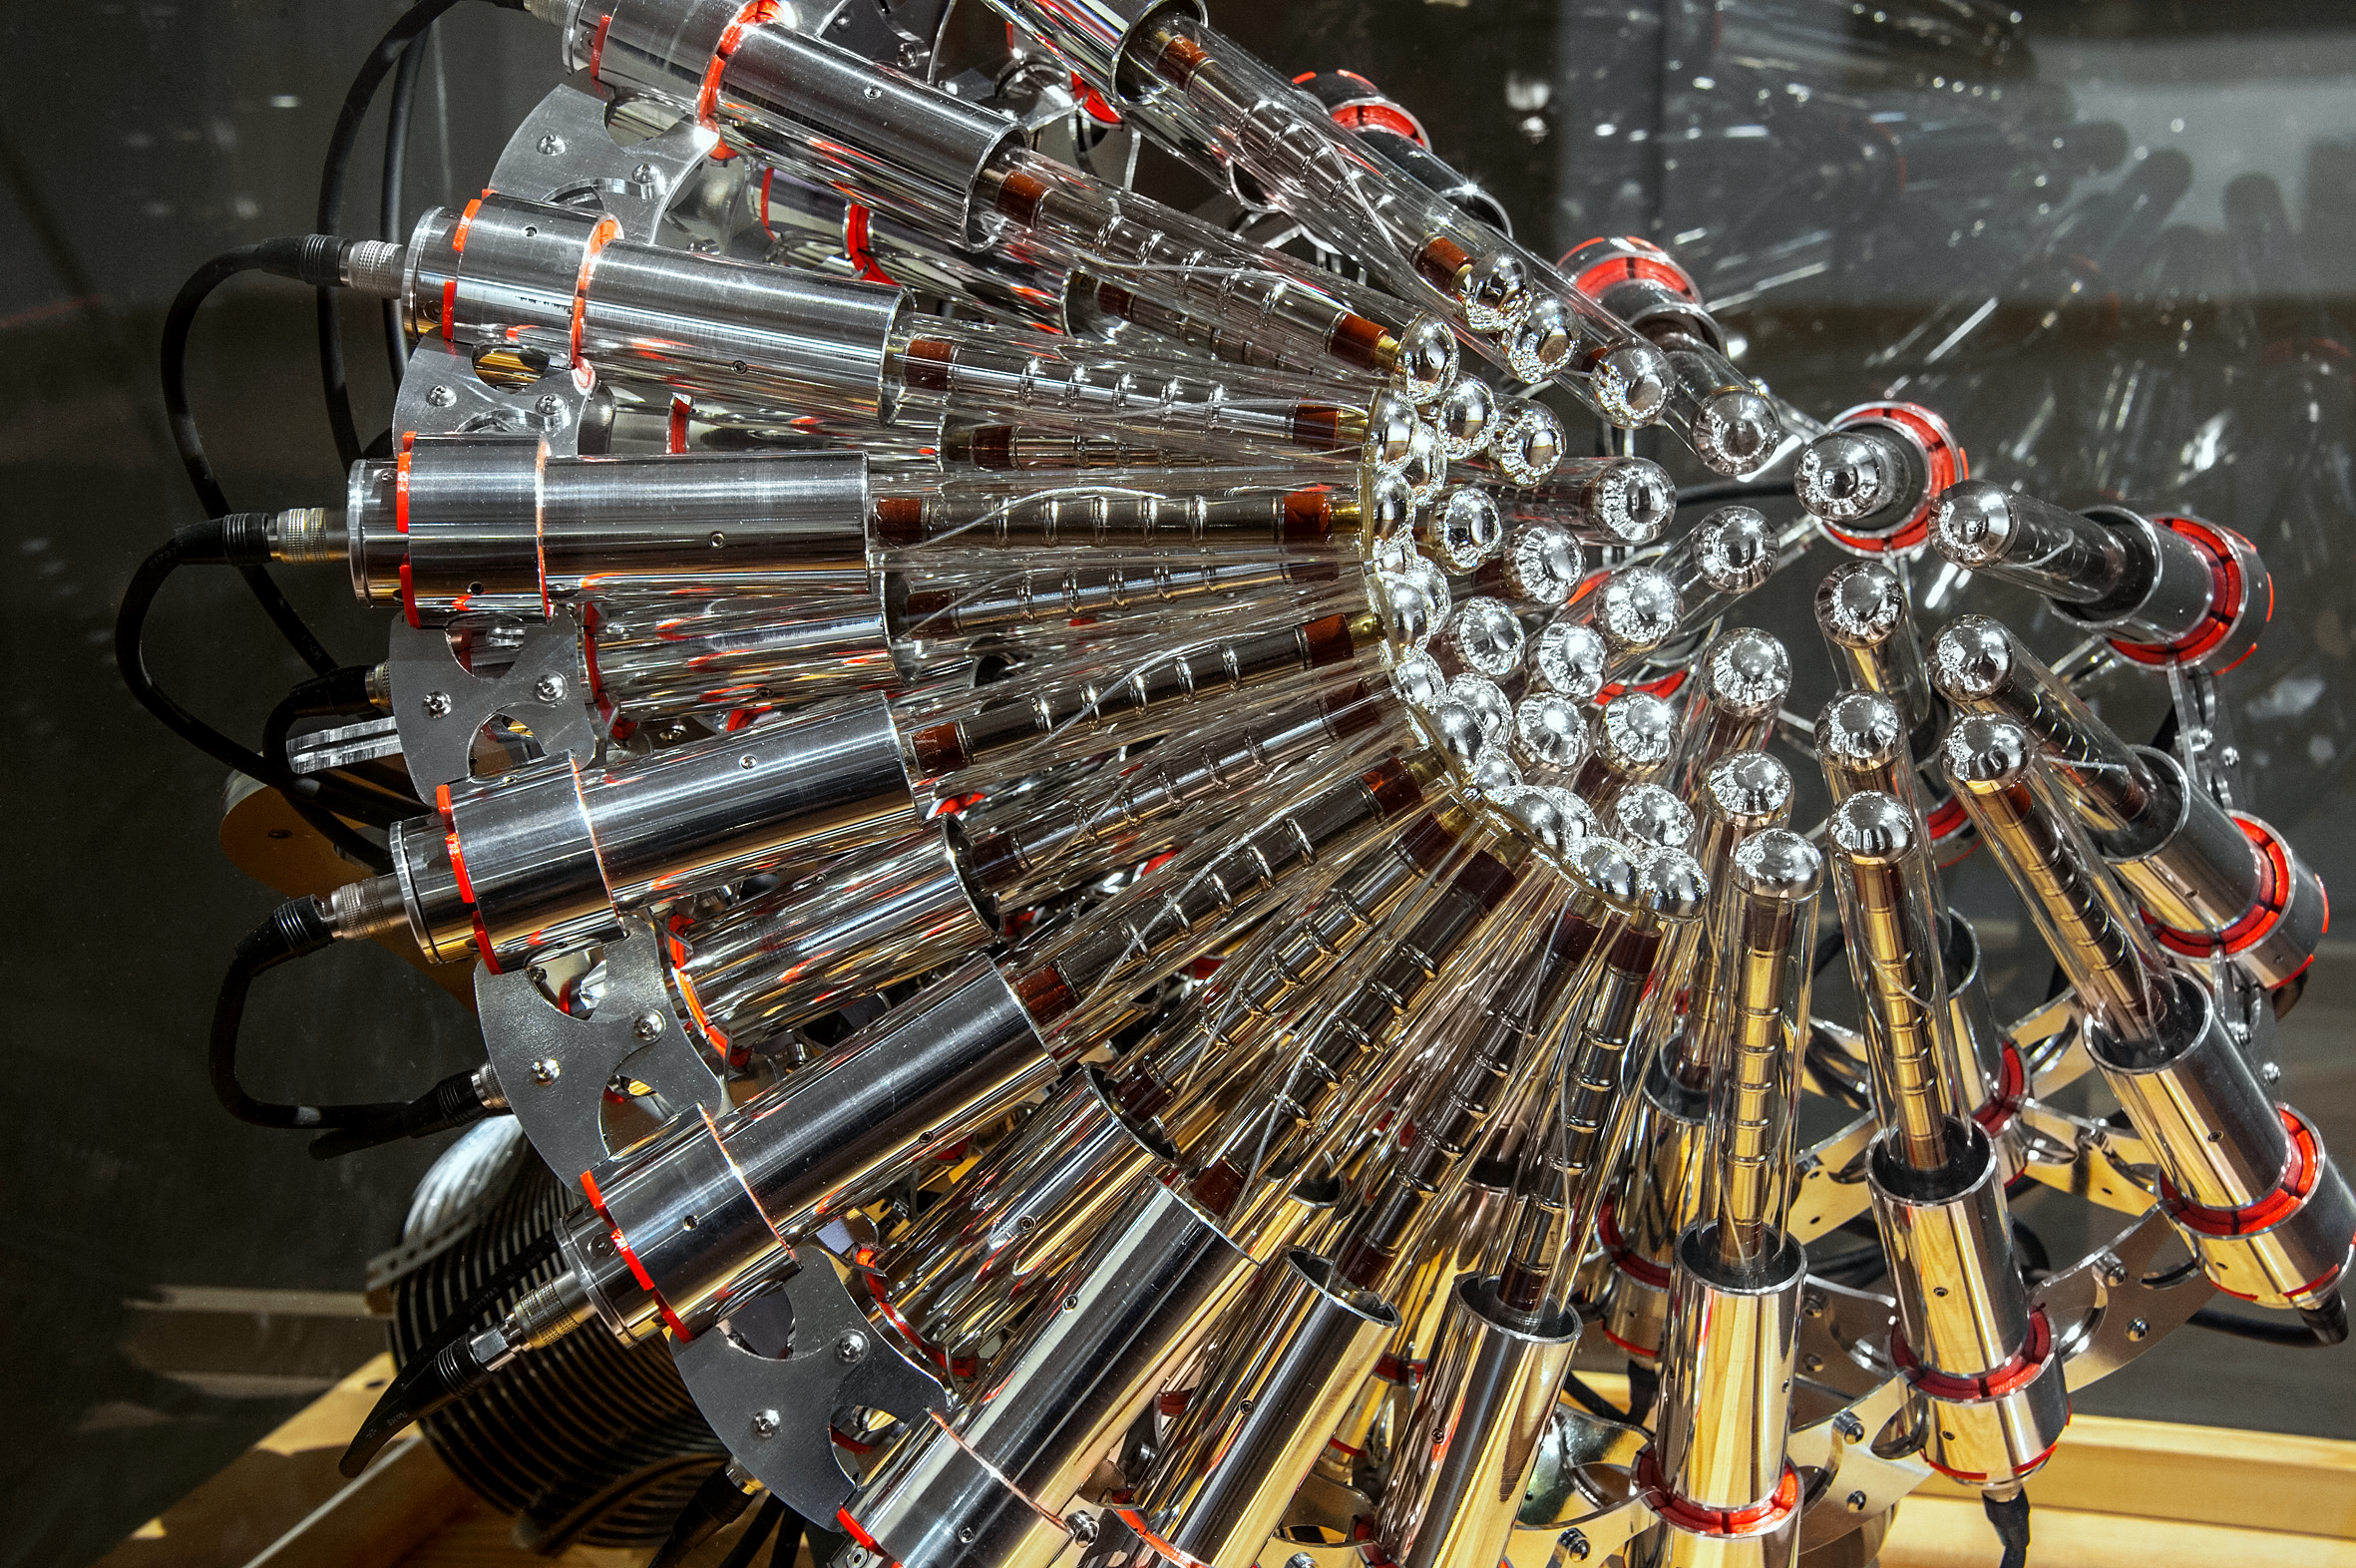

Our Place in Space — ARGOS

Yunchul Kim's ARGOS takes processes and methods of scientific research and mixes them into an artistic experience. The fireworks of flashing lights visible in his installation correspond to real time detection of muons reaching Earth's surface.

Muons are created by decay of cosmic radiation in the upper atmosphere. Cosmic rays can come from a variety of sources in space; but most of them are high-energy remnants of supernovae explosions. Every time a muon collides with one of the 41 Geier-Müller counters in the ARGOS installation, a light flashes.

The installation is part of the Hubble travelling exhibition Our Place in Space.

Credit: NHM Wien, Kurt Kracher